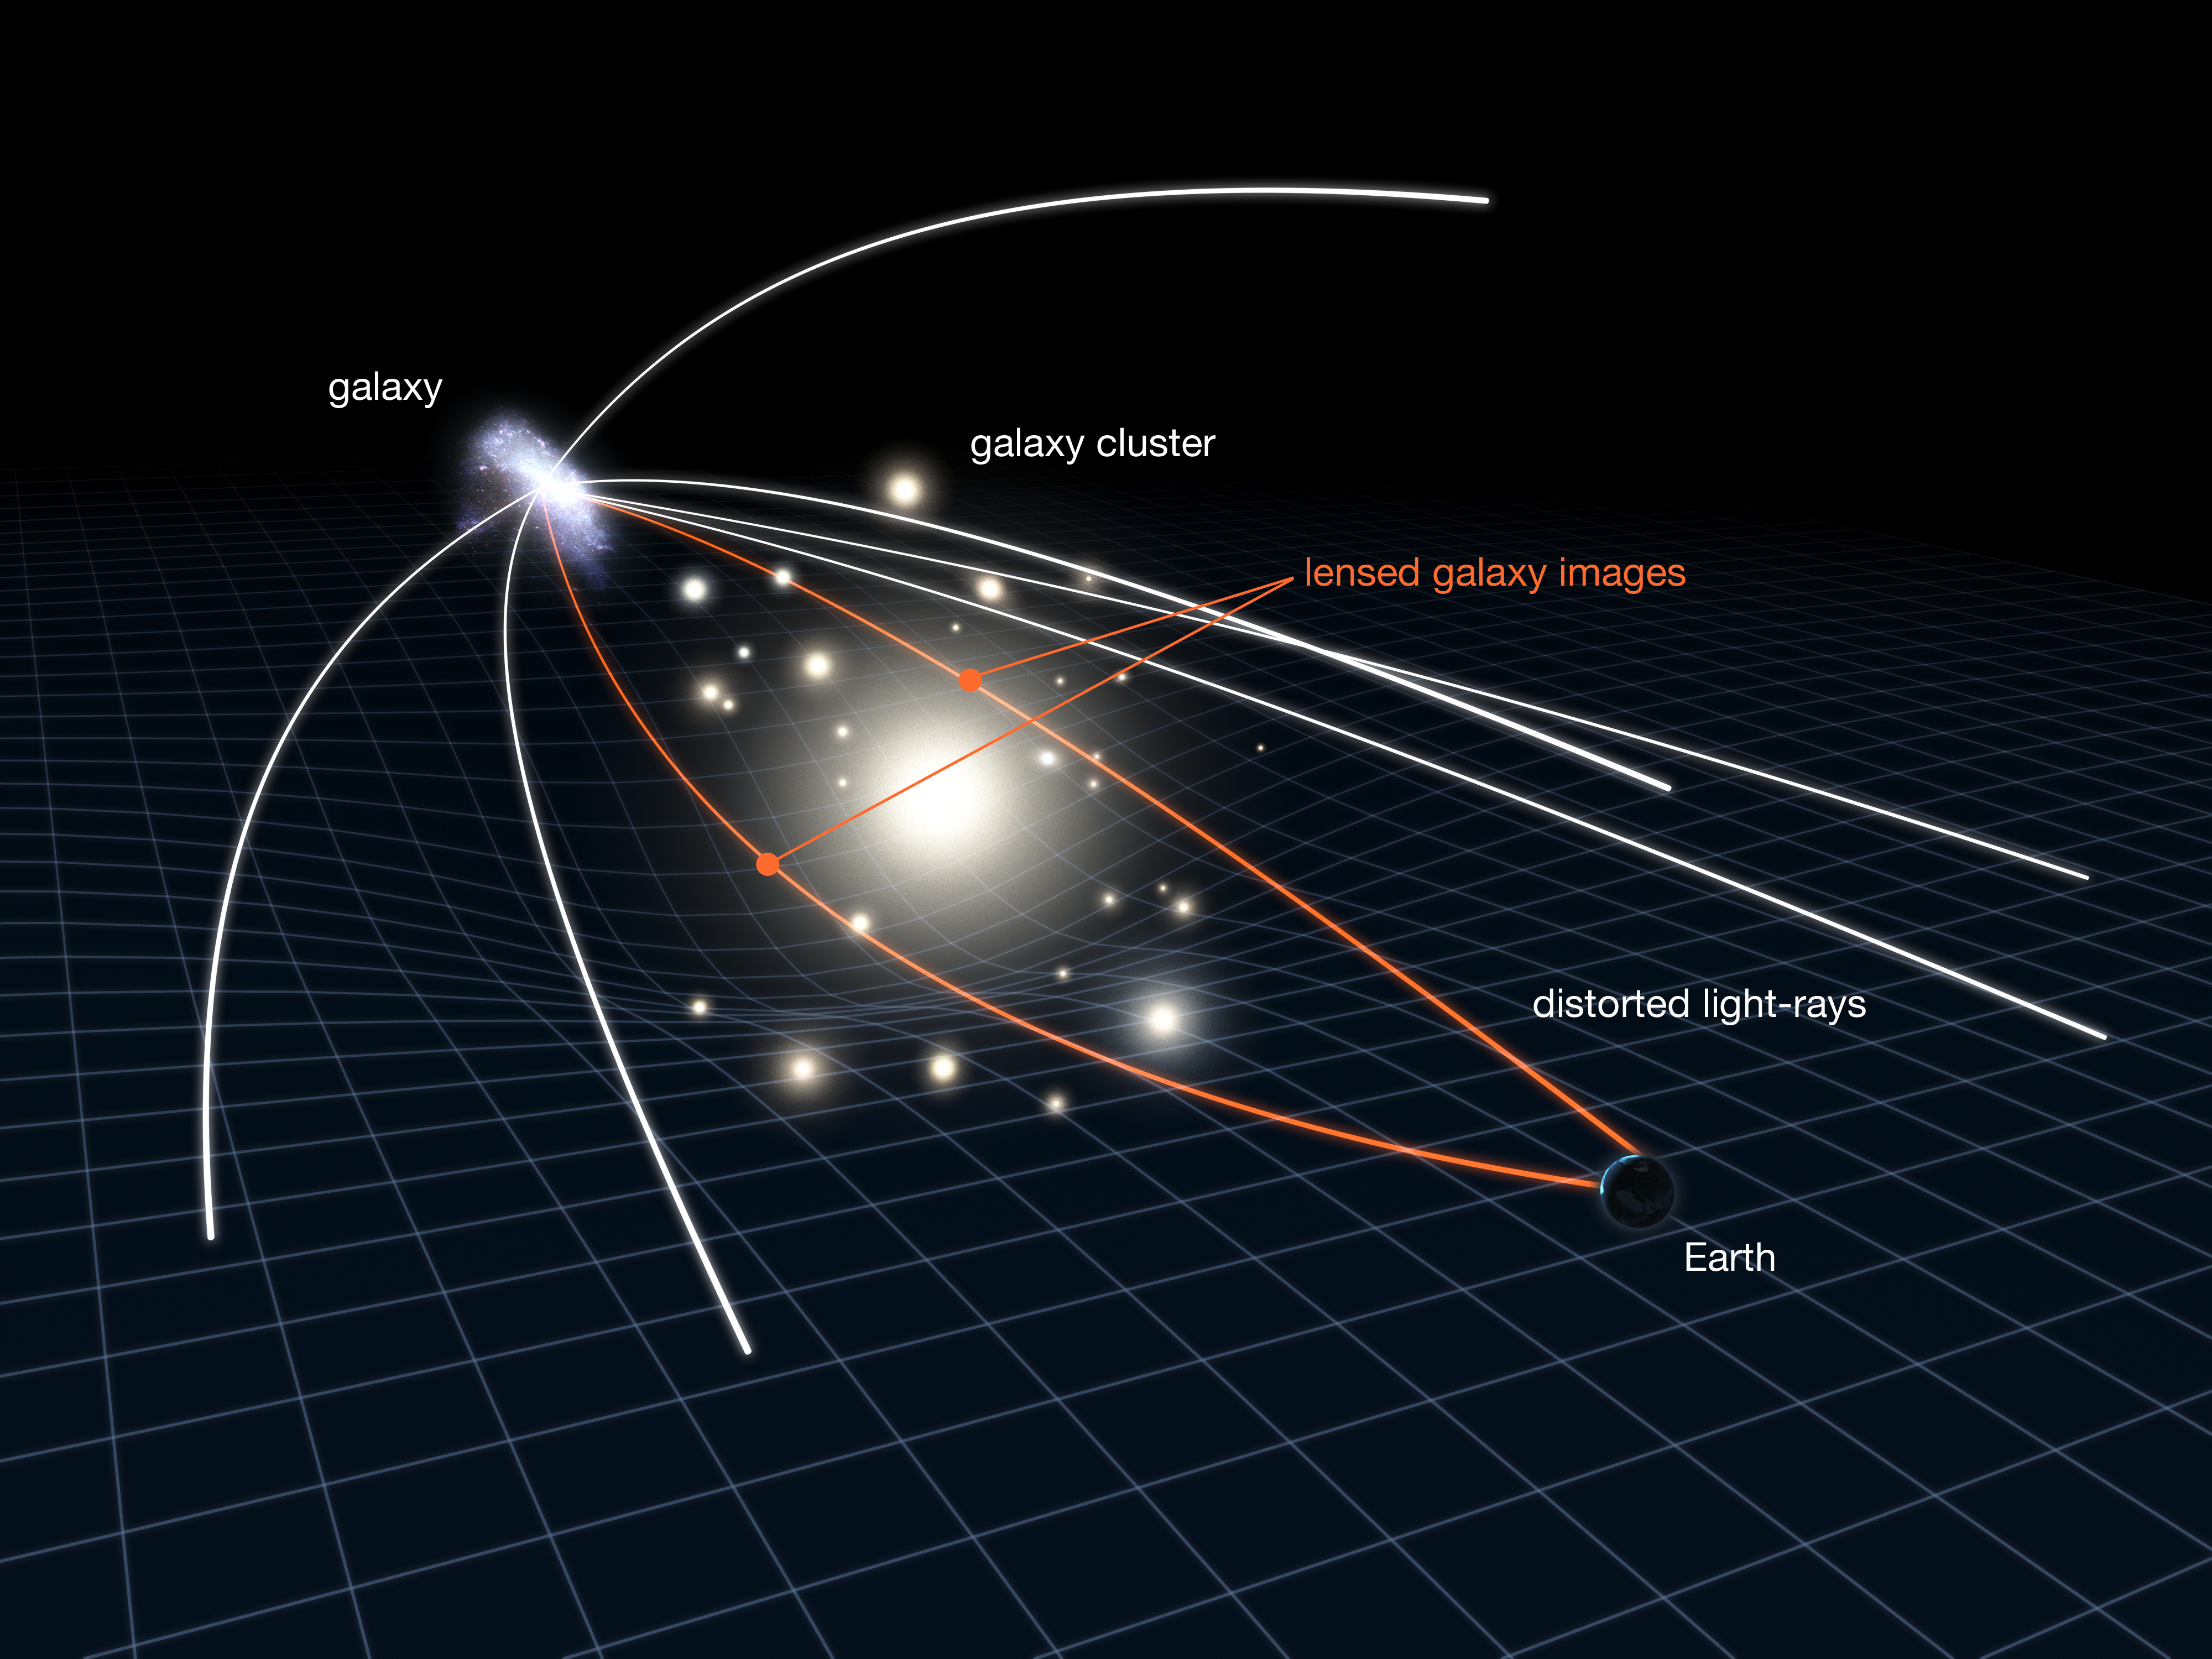

Gravitational lensing in action

This illustration shows a phenomenon known as gravitational lensing, which is used by astronomers to study very distant and very faint galaxies. Note that the scale has been greatly exaggerated in this diagram. In reality, the distant galaxy is much further away and much smaller.

Lensing clusters are clusters of elliptical galaxies whose gravity is so strong that they bend the light from the galaxies behind them. This produces distorted, and often multiple images of the background galaxy. But despite this distortion, gravitational lenses allow for greatly improved observations as the gravity bends the light’s path towards Hubble, amplifying the light and making otherwise invisible objects observable.

A team of astronomers has used Abell 383, one such gravitational lens, to observe a distant galaxy whose light is resolved into two images by the cluster. The gravitational lensing effect means that astronomers have been able to determine fascinating insights about the galaxy that would not normally be visible even with Hubble or large ground-based telescopes. Among their discoveries is that the distant galaxy’s stars are very old, meaning that galaxies probably formed earlier in cosmic history than we first thought.

Credit: NASA, ESA & L. Calçada